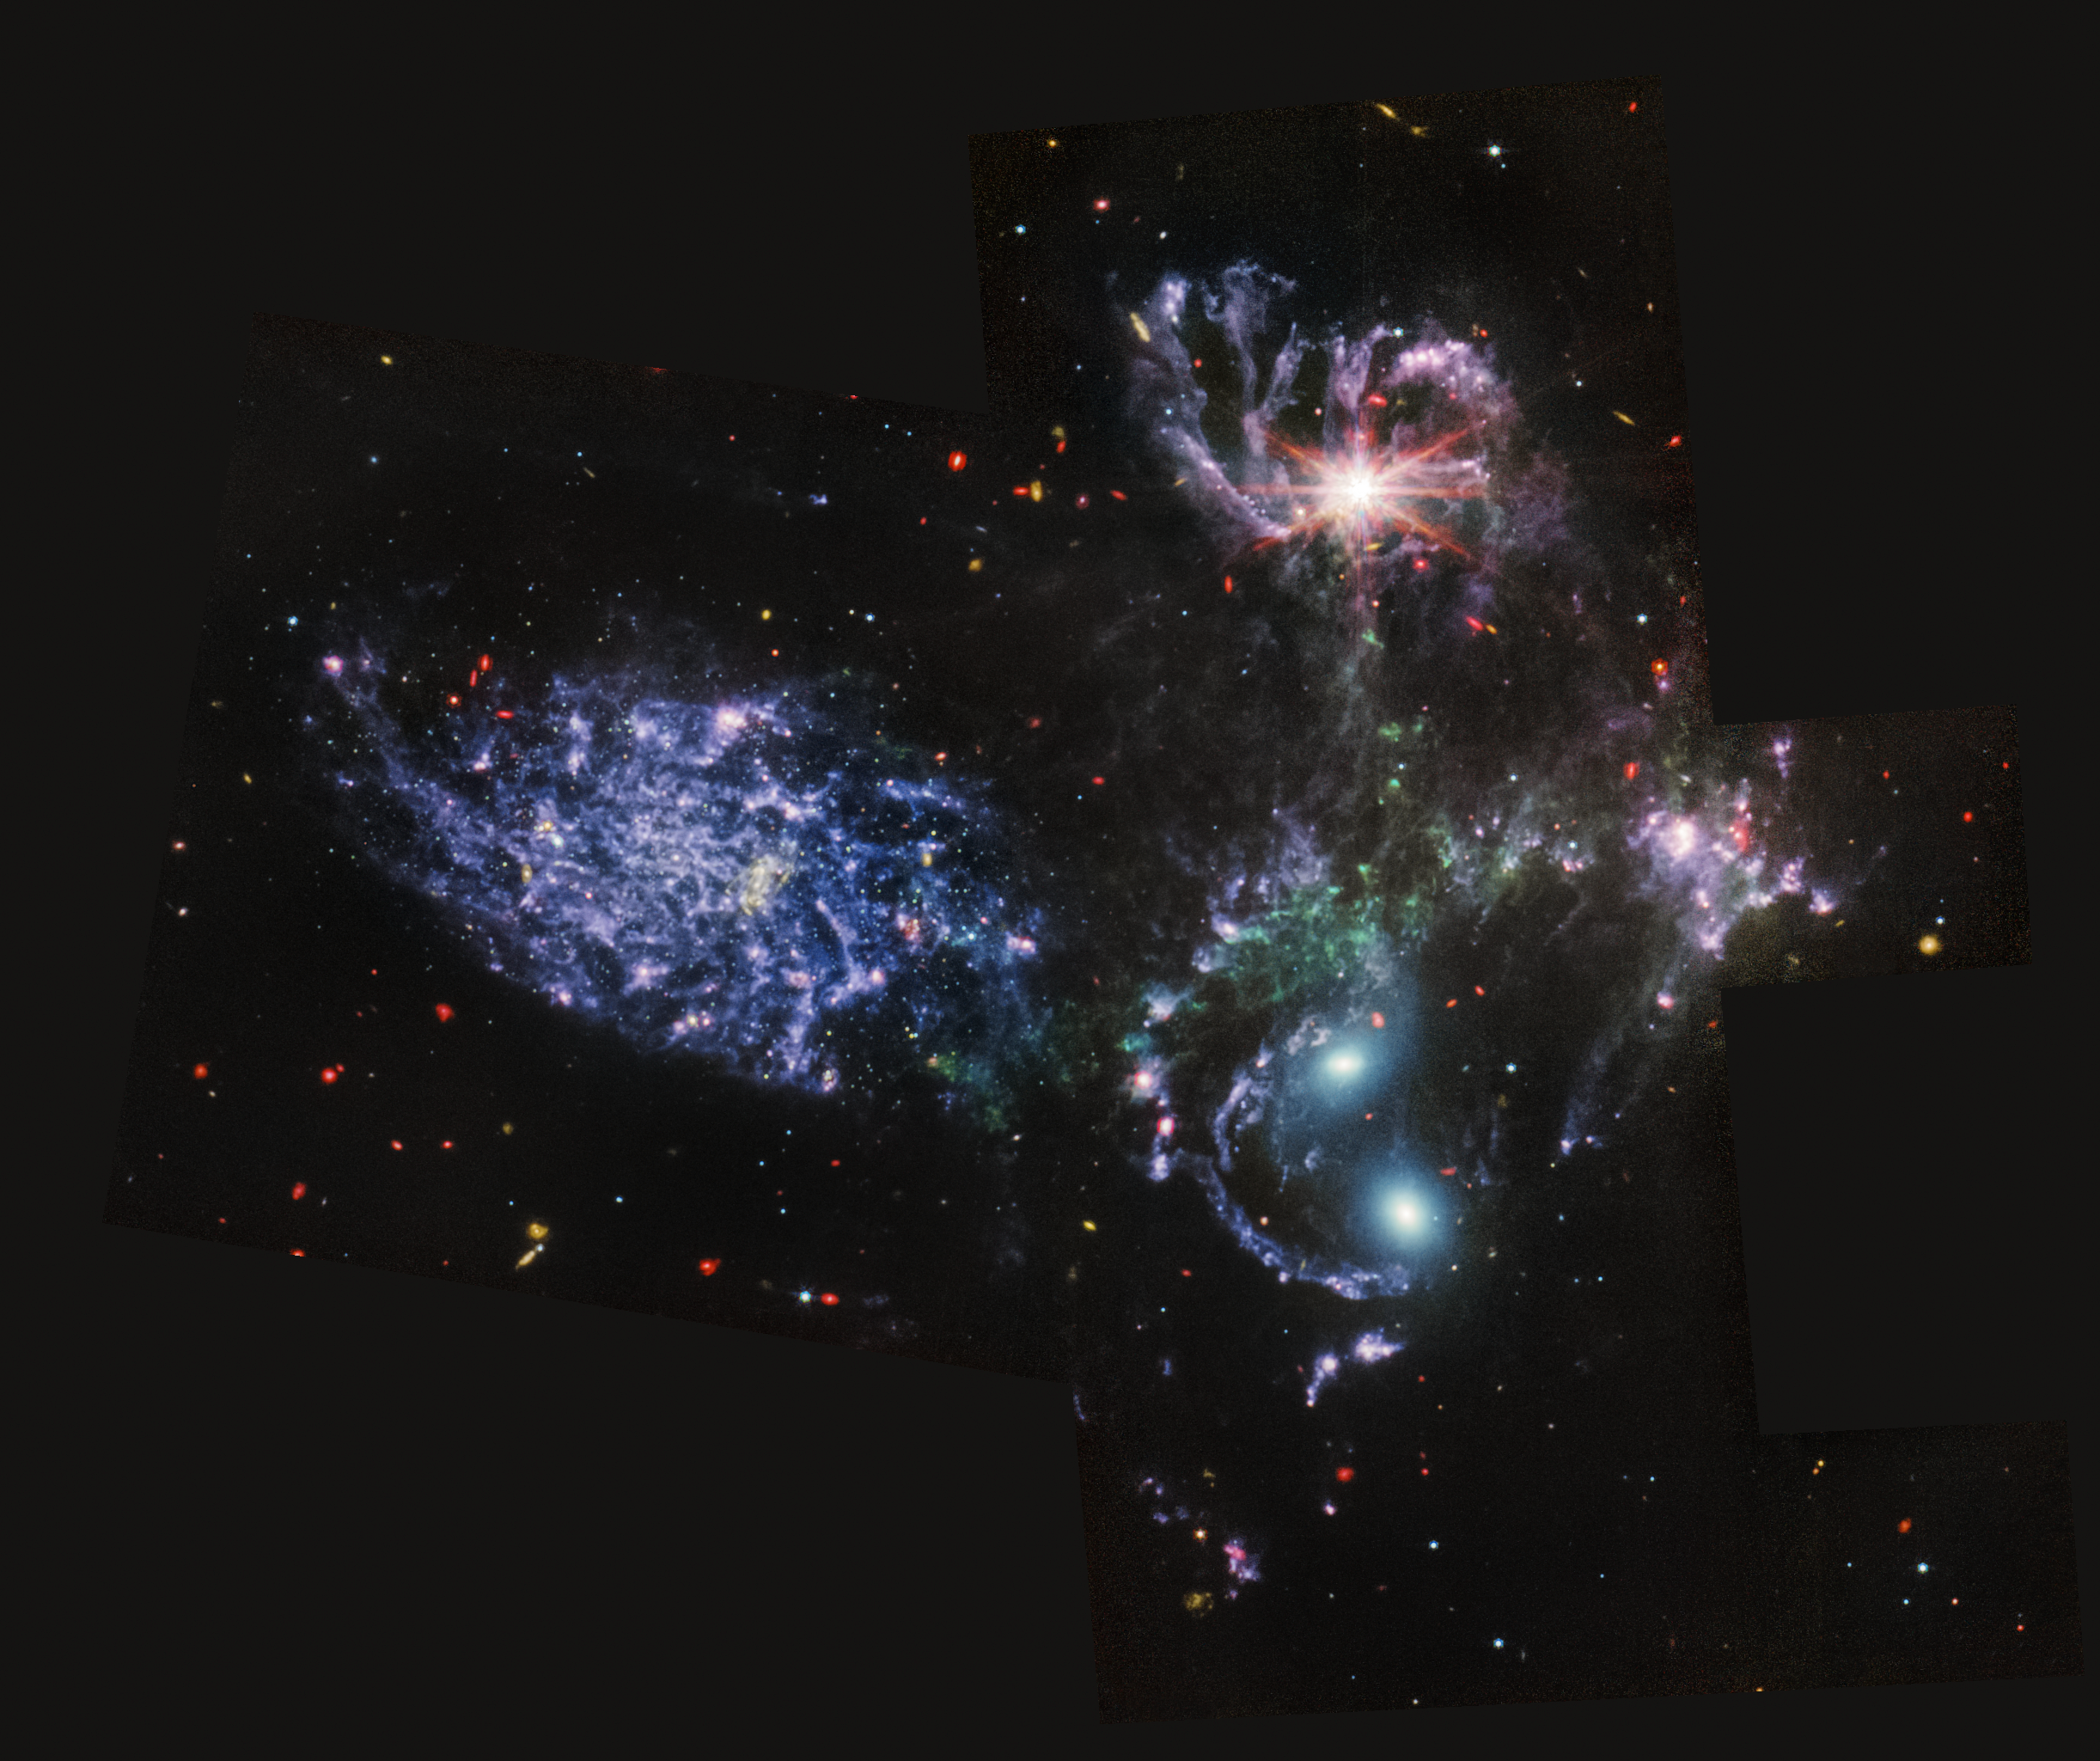

Stephan’s Quintet (MIRI Imaging)

Webb's Mid-InfraRed Instrument (MIRI) shows never-before-seen details of Stephan’s Quintet, a visual grouping of five galaxies, in this image. MIRI pierced through dust-enshrouded regions to reveal huge shock waves and tidal tails, gas and stars stripped from the outer regions of the galaxies by interactions. It also unveiled hidden areas of star formation. The new information from MIRI provides invaluable insights into how galactic interactions may have driven galaxy evolution in the early universe. This image was released as part of the first set of images from the NASA/ESA/CSA James Webb Space Telescope on 12 July 2022 (for a full array of Webb’s first images and spectra, including downloadable files, please visit this page).

This image contains one more MIRI filter than was used in the NIRCam-MIRI composite picture. The image processing specialists at the Space Telescope Science Institute in Baltimore opted to use all three MIRI filters and the colours red, green and blue to most clearly differentiate the galaxy features from each other and the shock waves between the galaxies.

In this image, red denotes dusty, star-forming regions, as well as extremely distant, early galaxies and galaxies enshrouded in thick dust. Blue point sources show stars or star clusters without dust. Diffuse areas of blue indicate dust that has a significant amount of large hydrocarbon molecules. For small background galaxies scattered throughout the image, the green and yellow colours represent more distant, earlier galaxies that are rich in these hydrocarbons as well.

Stephan’s Quintet’s topmost galaxy – NGC 7319 – harbours a supermassive black hole 24 million times the mass of the Sun. It is actively accreting material and puts out light energy equivalent to 40 billion Suns. MIRI sees through the dust surrounding this black hole to unveil the strikingly bright active galactic nucleus.

As a bonus, the deep mid-infrared sensitivity of MIRI revealed a sea of previously unresolved background galaxies reminiscent of Hubble’s Deep Fields.

Together, the five galaxies of Stephan’s Quintet are also known as the Hickson Compact Group 92 (HCG 92). Although called a “quintet,” only four of the galaxies are truly close together and caught up in a cosmic dance. The fifth and leftmost galaxy, called NGC 7320, is well in the foreground compared with the other four. NGC 7320 resides 40 million light-years from Earth, while the other four galaxies (NGC 7317, NGC 7318A, NGC 7318B, and NGC 7319) are about 290 million light-years away. This is still fairly close in cosmic terms, compared with more distant galaxies billions of light-years away. Studying these relatively nearby galaxies helps scientists better understand structures seen in a much more distant universe.

This proximity provides astronomers a ringside seat for witnessing the merging of and interactions between galaxies that are so crucial to all of galaxy evolution. Rarely do scientists see in so much exquisite detail how interacting galaxies trigger star formation in each other, and how the gas in these galaxies is being disturbed. Stephan’s Quintet is a fantastic “laboratory” for studying these processes fundamental to all galaxies.

Tight groups like this may have been more common in the early universe when their superheated, infalling material may have fueled very energetic black holes called quasars. Even today, the topmost galaxy in the group – NGC 7319 – harbours an active galactic nucleus, a supermassive black hole that is actively pulling in material.

MIRI was contributed by ESA and NASA, with the instrument designed and built by a consortium of nationally funded European Institutes (The MIRI European Consortium) in partnership with JPL and the University of Arizona.

Credit: NASA, ESA, CSA, and STScI